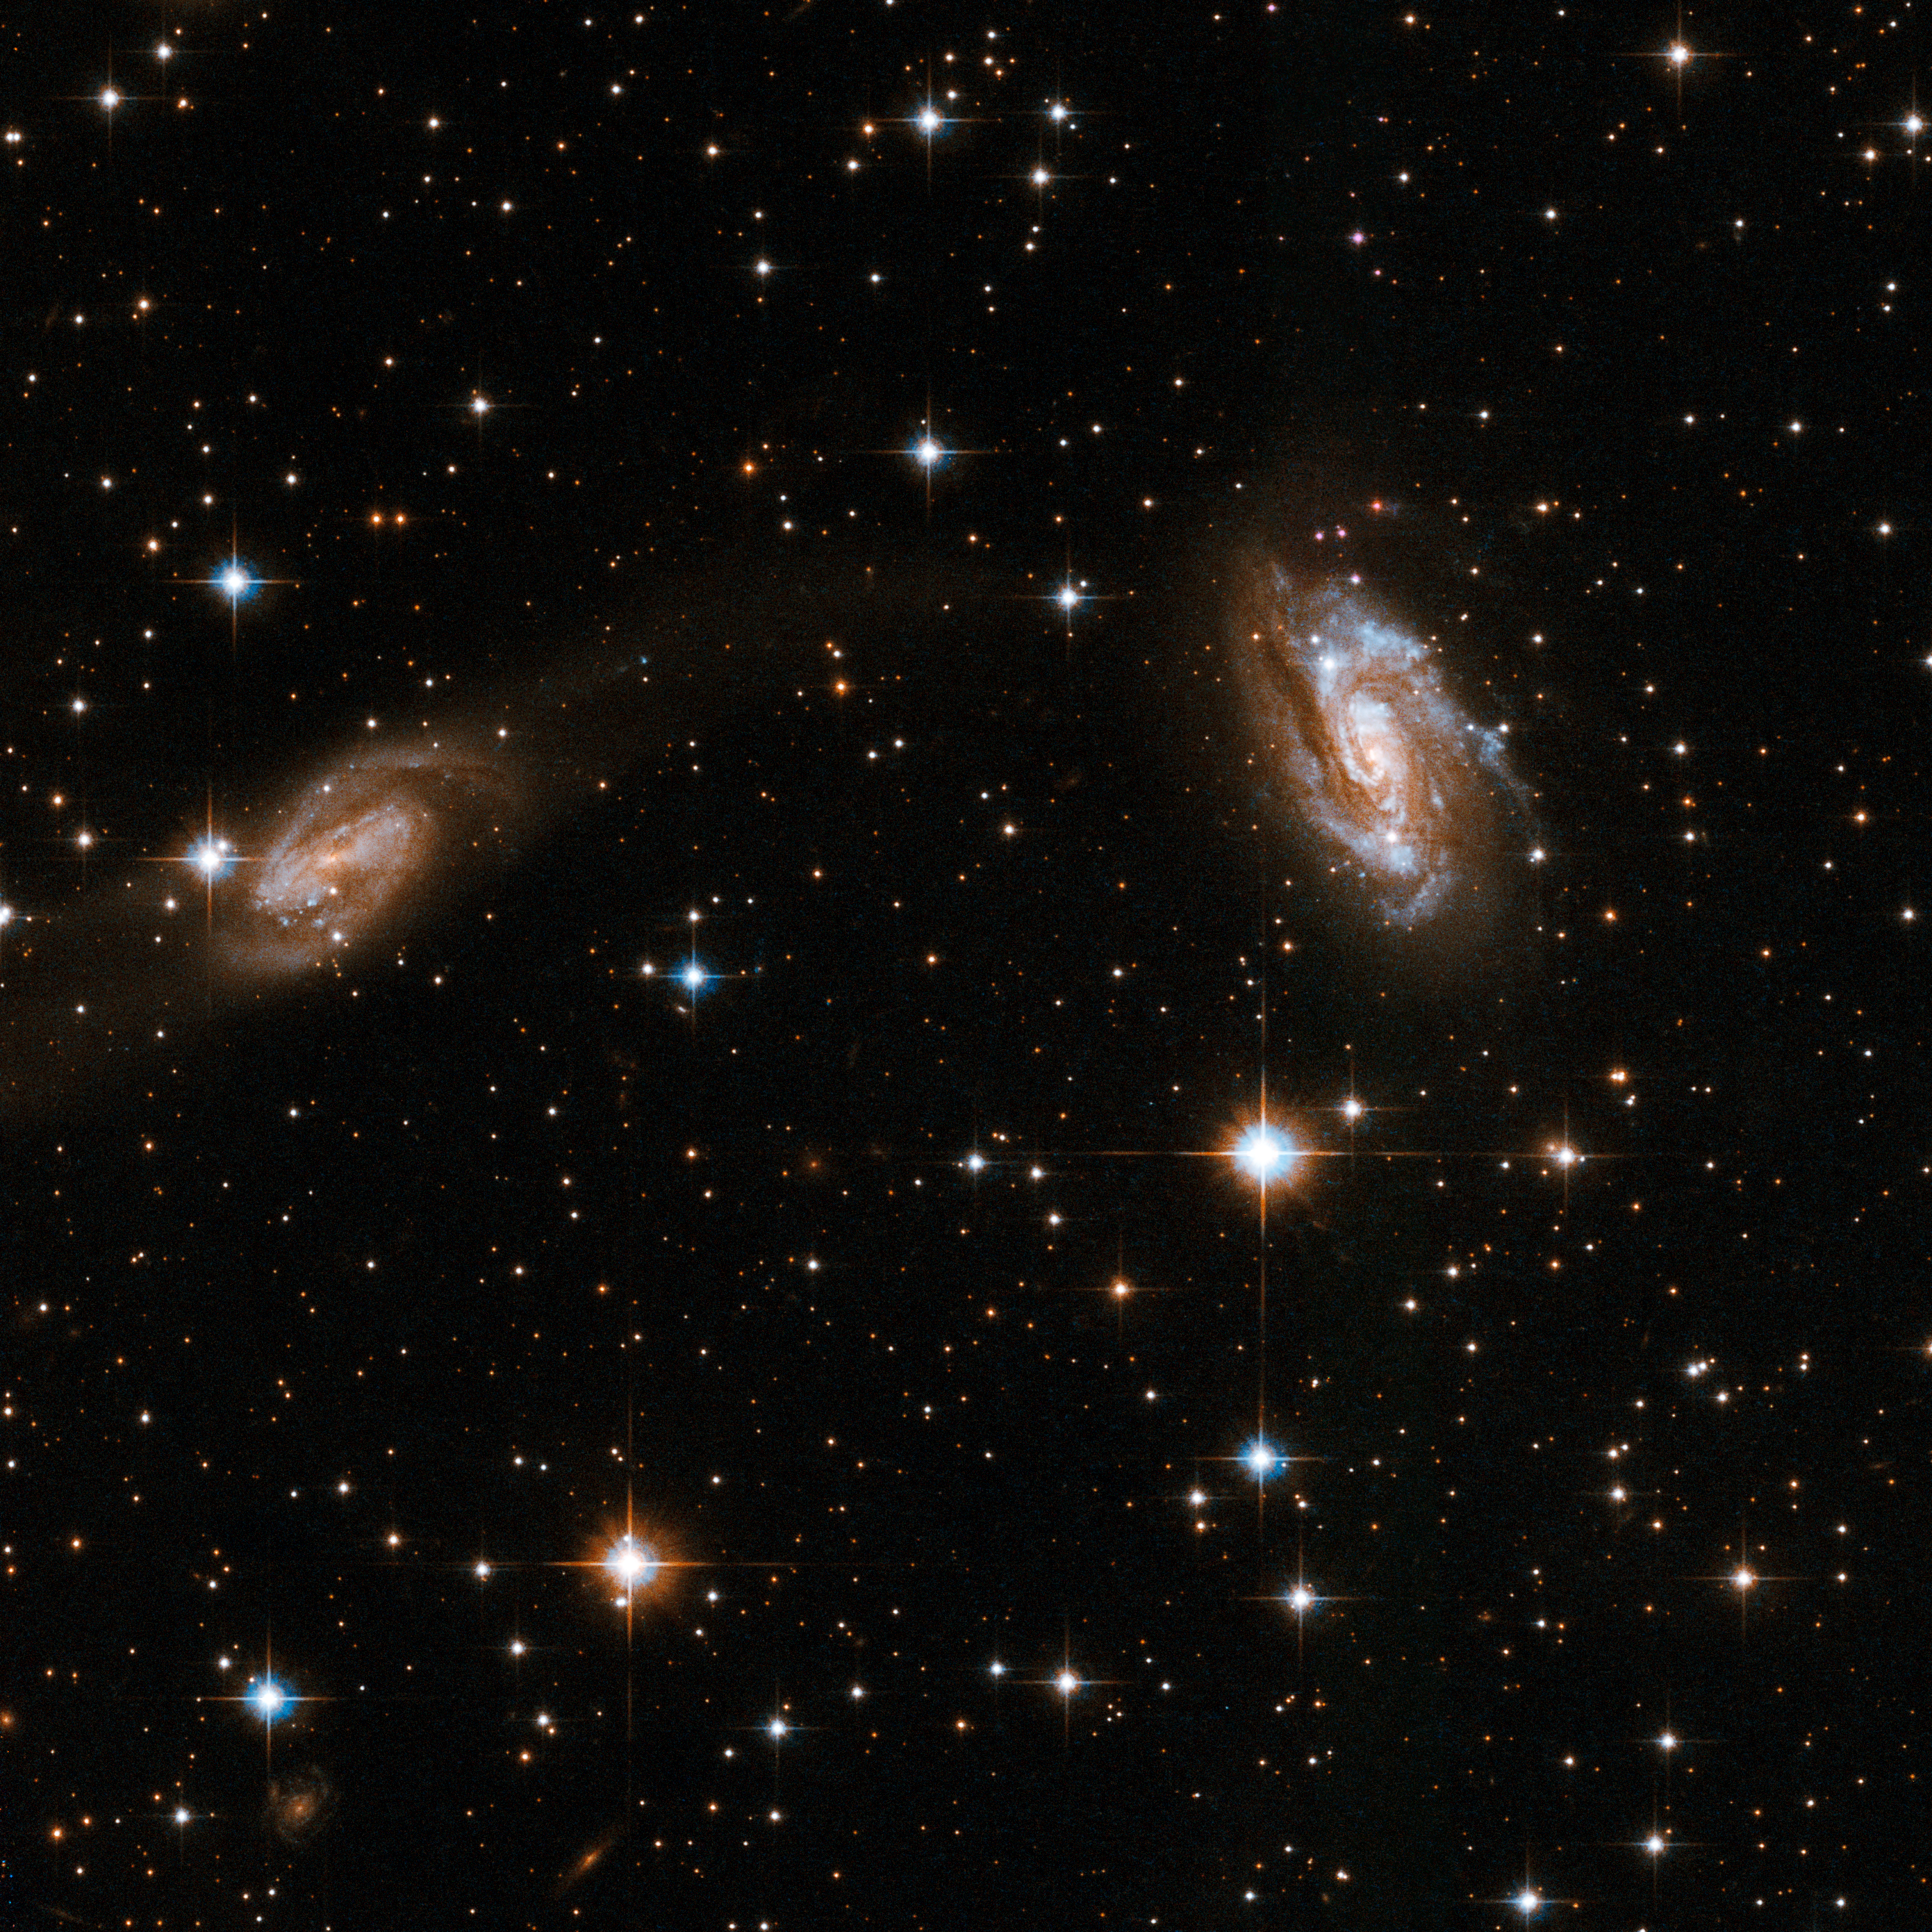

IRAS 18090+0130

This system consists of two interacting spiral galaxies. The galaxy to the left displays a dim plume of luminosity that extends to the right in the direction of the second spiral. Both galaxies are partly obscured by dust lanes. The galaxy at centre is adorned with blue knots of stars. IRAS 18090+0130 is located in the constellation of Ophiuchus, the Serpent Holder, some 400 million light-years away from Earth.

This image is part of a large collection of 59 images of merging galaxies taken by the Hubble Space Telescope and released on the occasion of its 18th anniversary on 24th April 2008.

Credit: NASA, ESA, the Hubble Heritage Team (STScI/AURA)-ESA/Hubble Collaboration and A. Evans (University of Virginia, Charlottesville/NRAO/Stony Brook University)